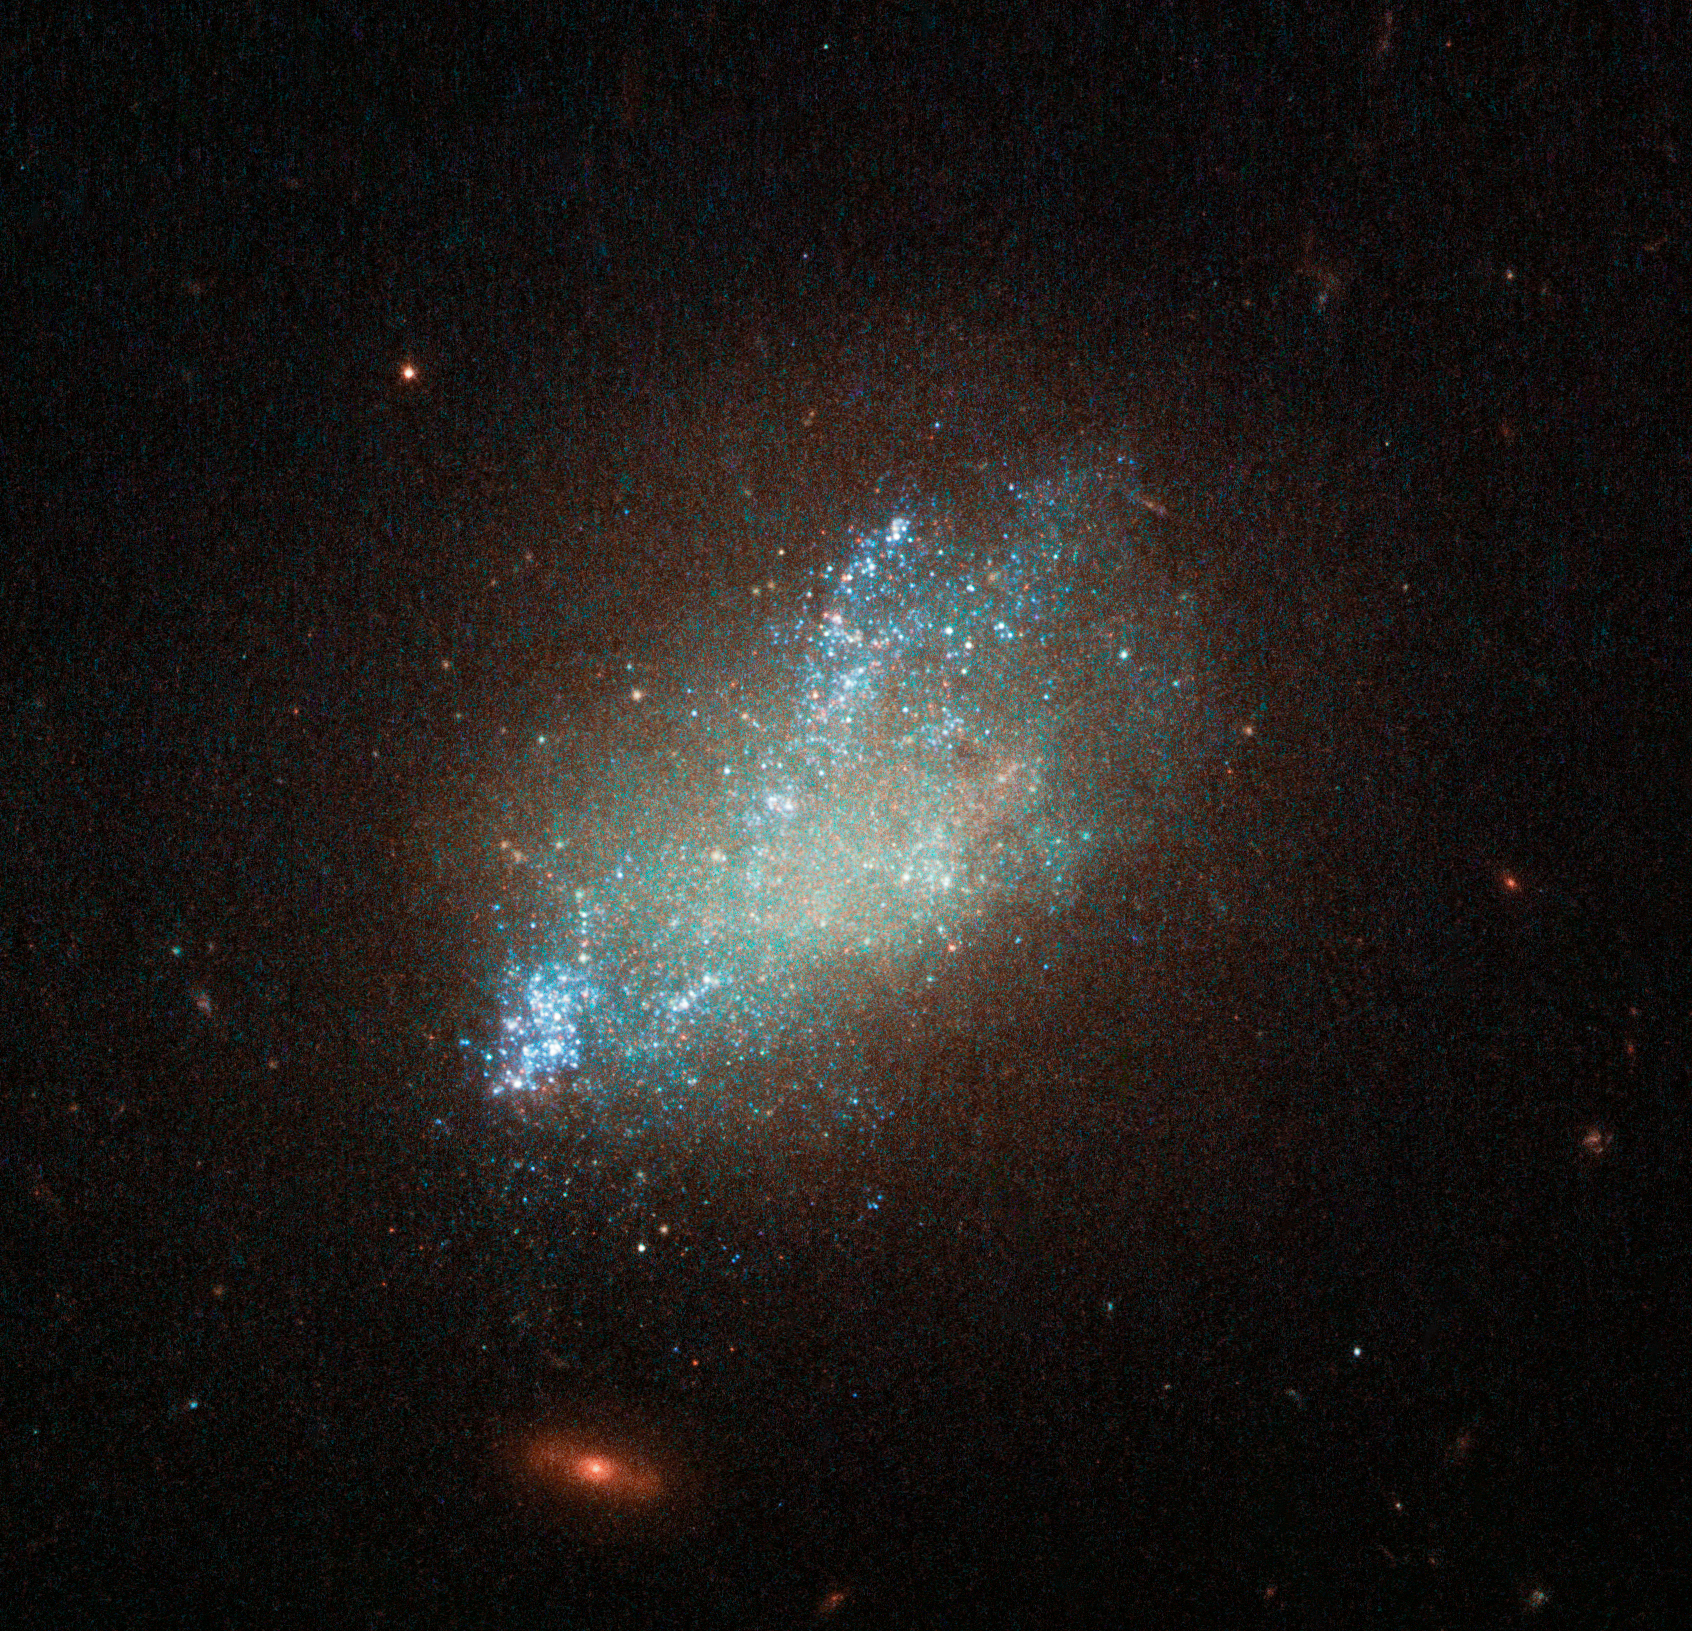

A spattering of blue

Far beyond the stars in the constellation of Leo (The Lion) is irregular galaxy IC 559.

IC 559 is not your everyday galaxy. With its irregular shape and bright blue spattering of stars, it is a fascinating galactic anomaly. It may look like sparse cloud, but it is in fact full of gas and dust which is spawning new stars.

Discovered in 1893, IC 559 lacks the symmetrical spiral appearance of some of its galactic peers and not does not conform to a regular shape. It is actually classified as a “type Sm” galaxy — an irregular galaxy with some evidence for a spiral structure.

Irregular galaxies make up about a quarter of all known galaxies and do not fall into any of the regular classes of the Hubble sequence. Most of these uniquely shaped galaxies were not always so — IC 559 may have once been a conventional spiral galaxy that was then distorted and twisted by the gravity of a nearby cosmic companion.

This image, captured by the NASA/ESA Hubble Space Telescope’s Wide Field Camera 3, combines a wide range of wavelengths spanning the ultraviolet, optical, and infrared parts of the spectrum.

Credit: ESA/Hubble, NASA, D. Calzetti (UMass) and the LEGUS Team